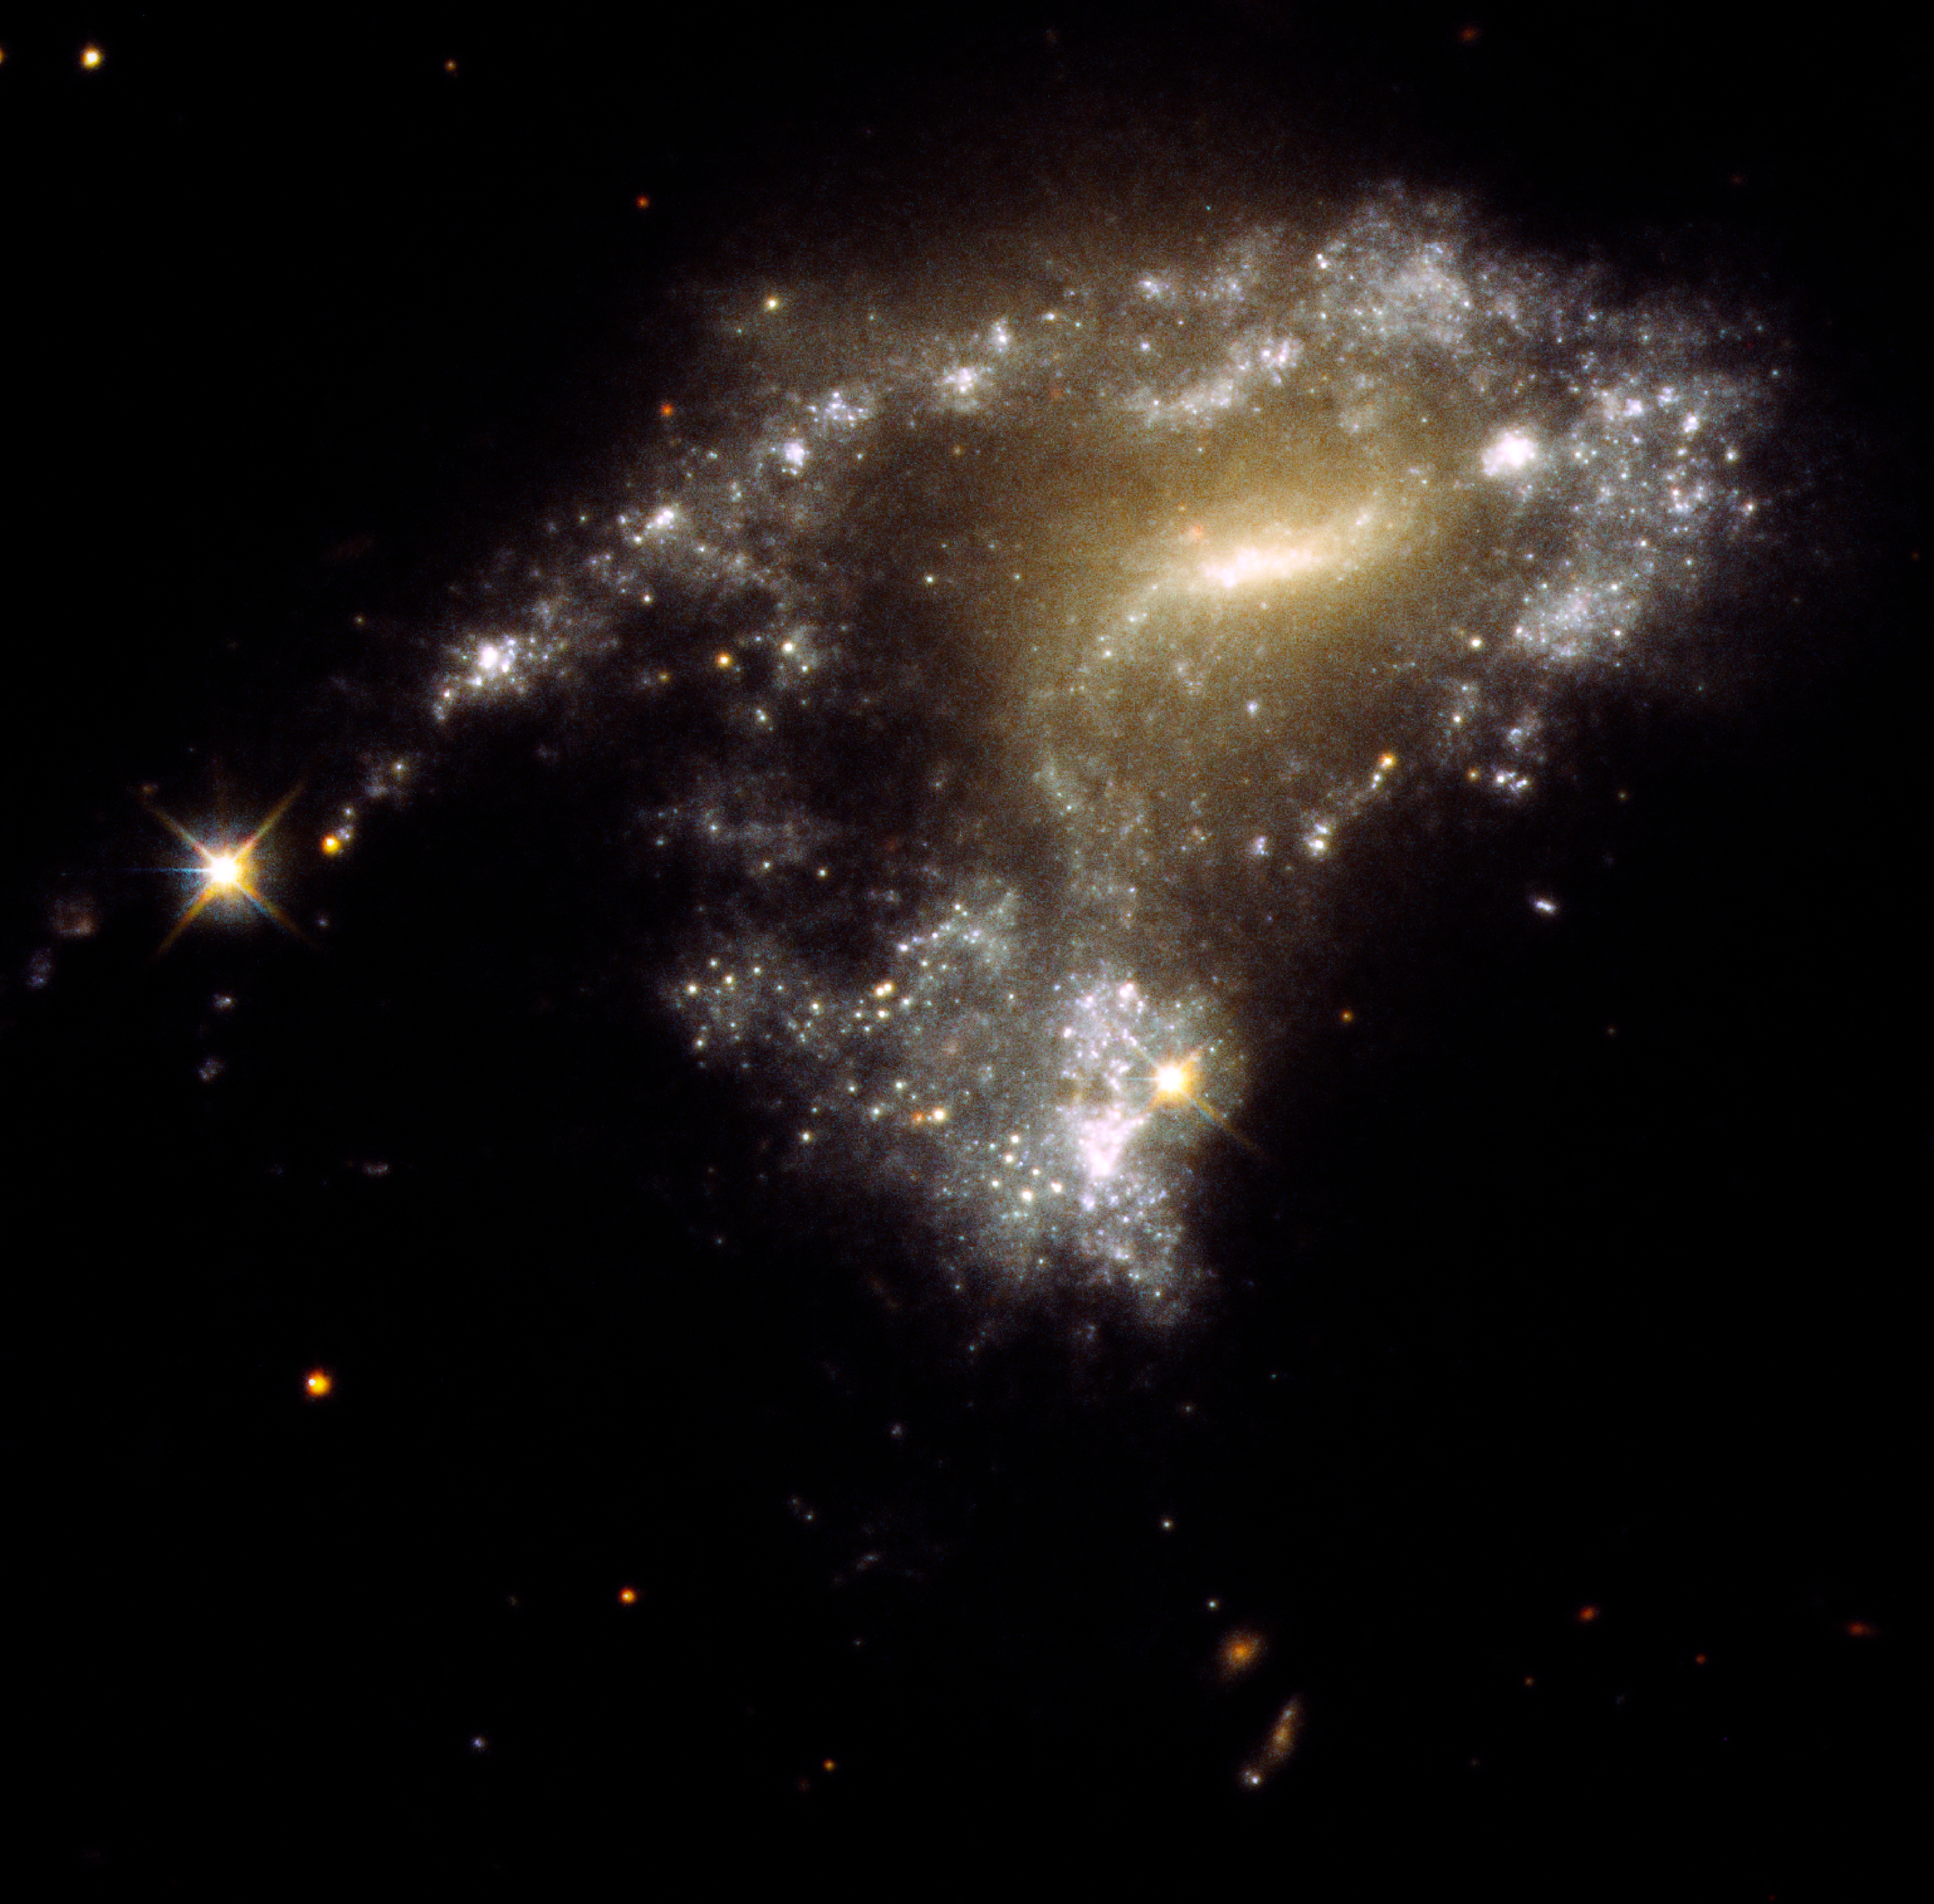

Hubble traces 'string-of-pearls' star clusters in galaxy collisions

Contrary to what you might think, galaxy collisions do not destroy stars. In fact, the rough-and-tumble dynamics trigger new generations of stars, and presumably accompanying planets. Now the NASA/ESA Hubble Space Telescope has homed in on twelve interacting galaxies that have long, tadpole-like tidal tails of gas, dust, and a plethora of stars. Hubble's exquisite sharpness and sensitivity to ultraviolet light have uncovered 425 clusters of newborn stars along these tails — each cluster contains as many as one million blue, newborn stars.

Clusters in tidal tails have been known about for decades. When galaxies interact, gravitational tidal forces pull out long streamers of gas and dust. Two popular examples are the Antennae and Mice galaxies with their long, narrow, finger-like projections. This image depicts another example: galaxy Arp-Madore 1054-325.

A team of astronomers used a combination of new observations and archival data to get ages and masses of tidal tail star clusters. They found that these clusters are very young — only 10 million years old. And they seem to be forming at the same rate along tails stretching for thousands of light-years. "It's a surprise to see lots of the young objects in the tails. It tells us a lot about cluster formation efficiency," said lead author Michael Rodruck of Randolph-Macon College in Ashland, Virginia.

Before the mergers, the galaxies were rich in dusty clouds of molecular hydrogen that may have simply remained inert. But the clouds got jostled and bumped into each other during the encounters. This compressed the hydrogen to the point where it precipitated a firestorm of star birth.

The fate of these strung-out star clusters is uncertain. They may stay gravitationally intact and evolve into globular star clusters — like those that orbit outside the plane of our Milky Way galaxy. Or they may disperse to form a halo of stars around their host galaxy, or get cast off to become wandering intergalactic stars. This string-of-pearls star formation may have been more common in the early universe, when galaxies collided with each other more frequently.

Credit: NASA, ESA, STScI, Jayanne English (University of Manitoba)